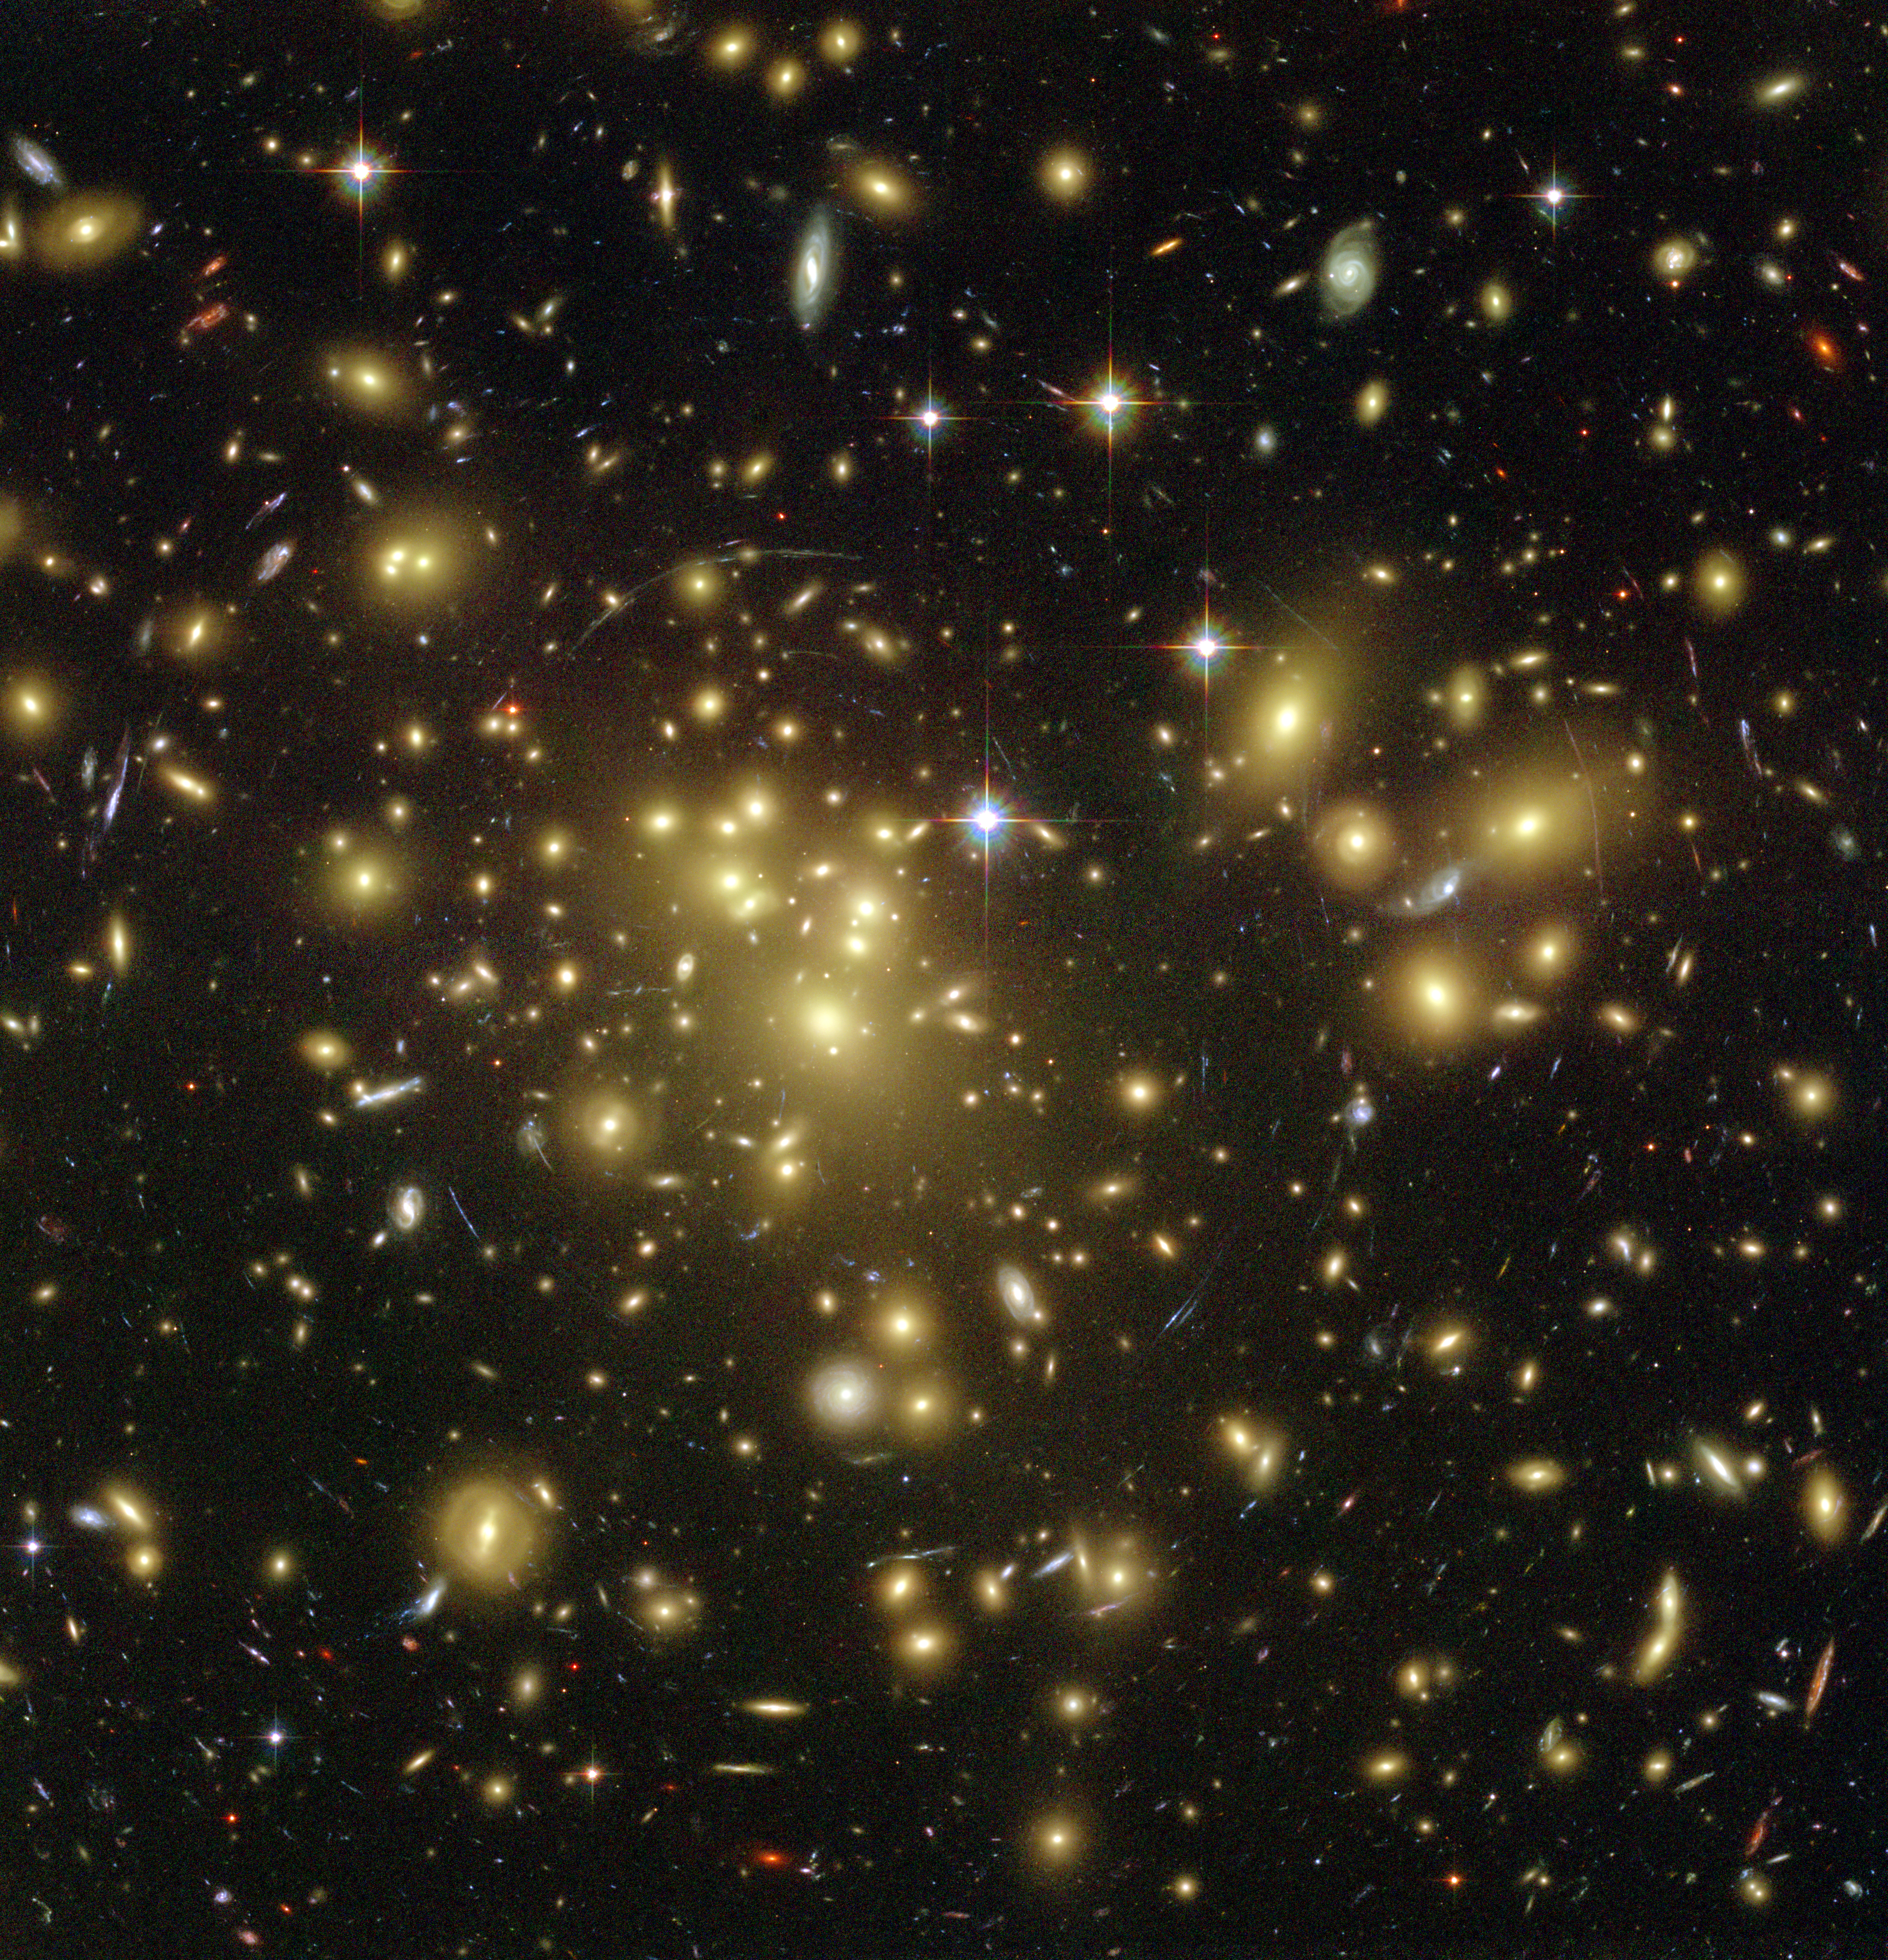

Hubble Looks Through Cosmic Zoom Lens

The Advanced Camera for Surveys (ACS) aboard the NASA/ESA Hubble Space Telescope has used a natural 'zoom lens' in space to boost its view of the distant universe. Besides offering an unprecedented and dramatic new view of the cosmos, the results promise to shed light on galaxy evolution and dark matter in space. Hubble peered straight through the center of one of the most massive galaxy clusters known, called Abell 1689.

For this observation, Hubble had to gaze at the distant cluster, located 2.2 billion light-years away, for more than 13 hours. The gravity of the cluster's trillion stars " plus dark matter " acts as a 2-million-light-year-wide 'lens' in space. This 'gravitational lens' bends and magnifies the light of galaxies located far behind it, distorting their shapes and creating multiple images of individual galaxies.

Credit: NASA, N. Benitez (JHU), T. Broadhurst (The Hebrew University), H. Ford (JHU), M. Clampin(STScI), G. Hartig (STScI), G. Illingworth (UCO/Lick Observatory), the ACS Science Team and ESA